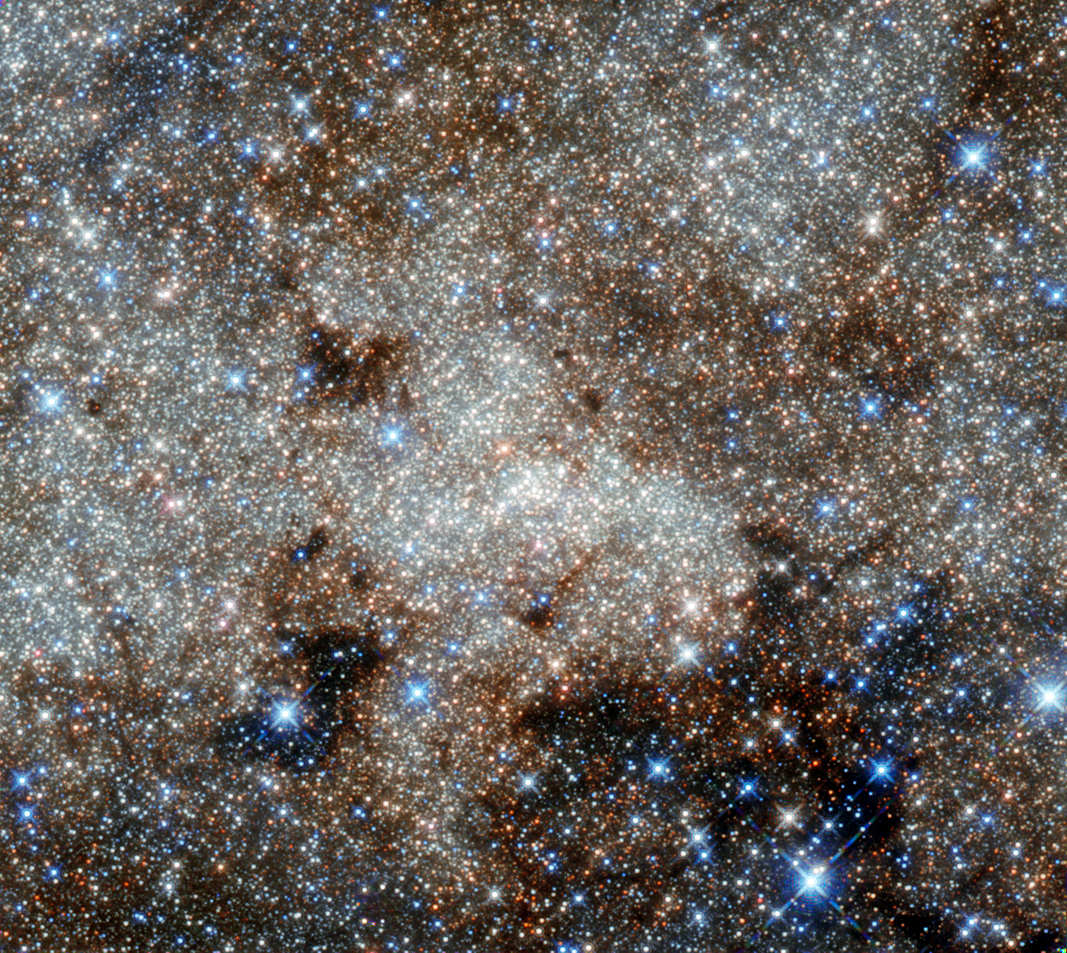

A monster in the Milky Way

This image, not unlike a pointillist painting, shows the star-studded centre of the Milky Way towards the constellation of Sagittarius. The crowded centre of our galaxy contains numerous complex and mysterious objects that are usually hidden at optical wavelengths by clouds of dust — but many are visible here in these infrared observations from Hubble.

However, the most famous cosmic object in this image still remains invisible: the monster at our galaxy’s heart called Sagittarius A*. Astronomers have observed stars spinning around this supermassive black hole (located right in the centre of the image), and the black hole consuming clouds of dust as it affects its environment with its enormous gravitational pull.

Infrared observations can pierce through thick obscuring material to reveal information that is usually hidden to the optical observer. This is the best infrared image of this region ever taken with Hubble, and uses infrared archive data from Hubble’s Wide Field Camera 3, taken in September 2011. It was posted to Flickr by Gabriel Brammer, a fellow at the European Southern Observatory based in Chile. He is also an ESO photo ambassador.

Credit: NASA, ESA, and G. Brammer